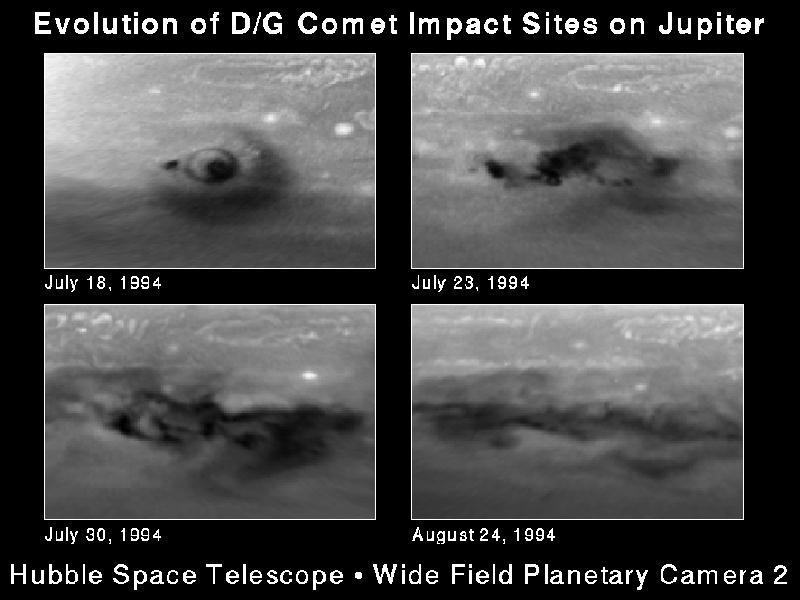

Evolution of D/G impact sites on Jupiter

This series of snapshots, taken with the Hubble Space Telescope, shows evolution of the comet P/Shoemaker-Levy 9 impact region called the D/G complex. This feature was produced by two nuclei of comet P/Shoemaker-Levy 9 that collided with Jupiter on 17 and 18 July 1994, respectively, and was later modified again by the impact of the S fragment on 21 July 1994.

Credit: H. Hammel, MIT and NASA/ESA